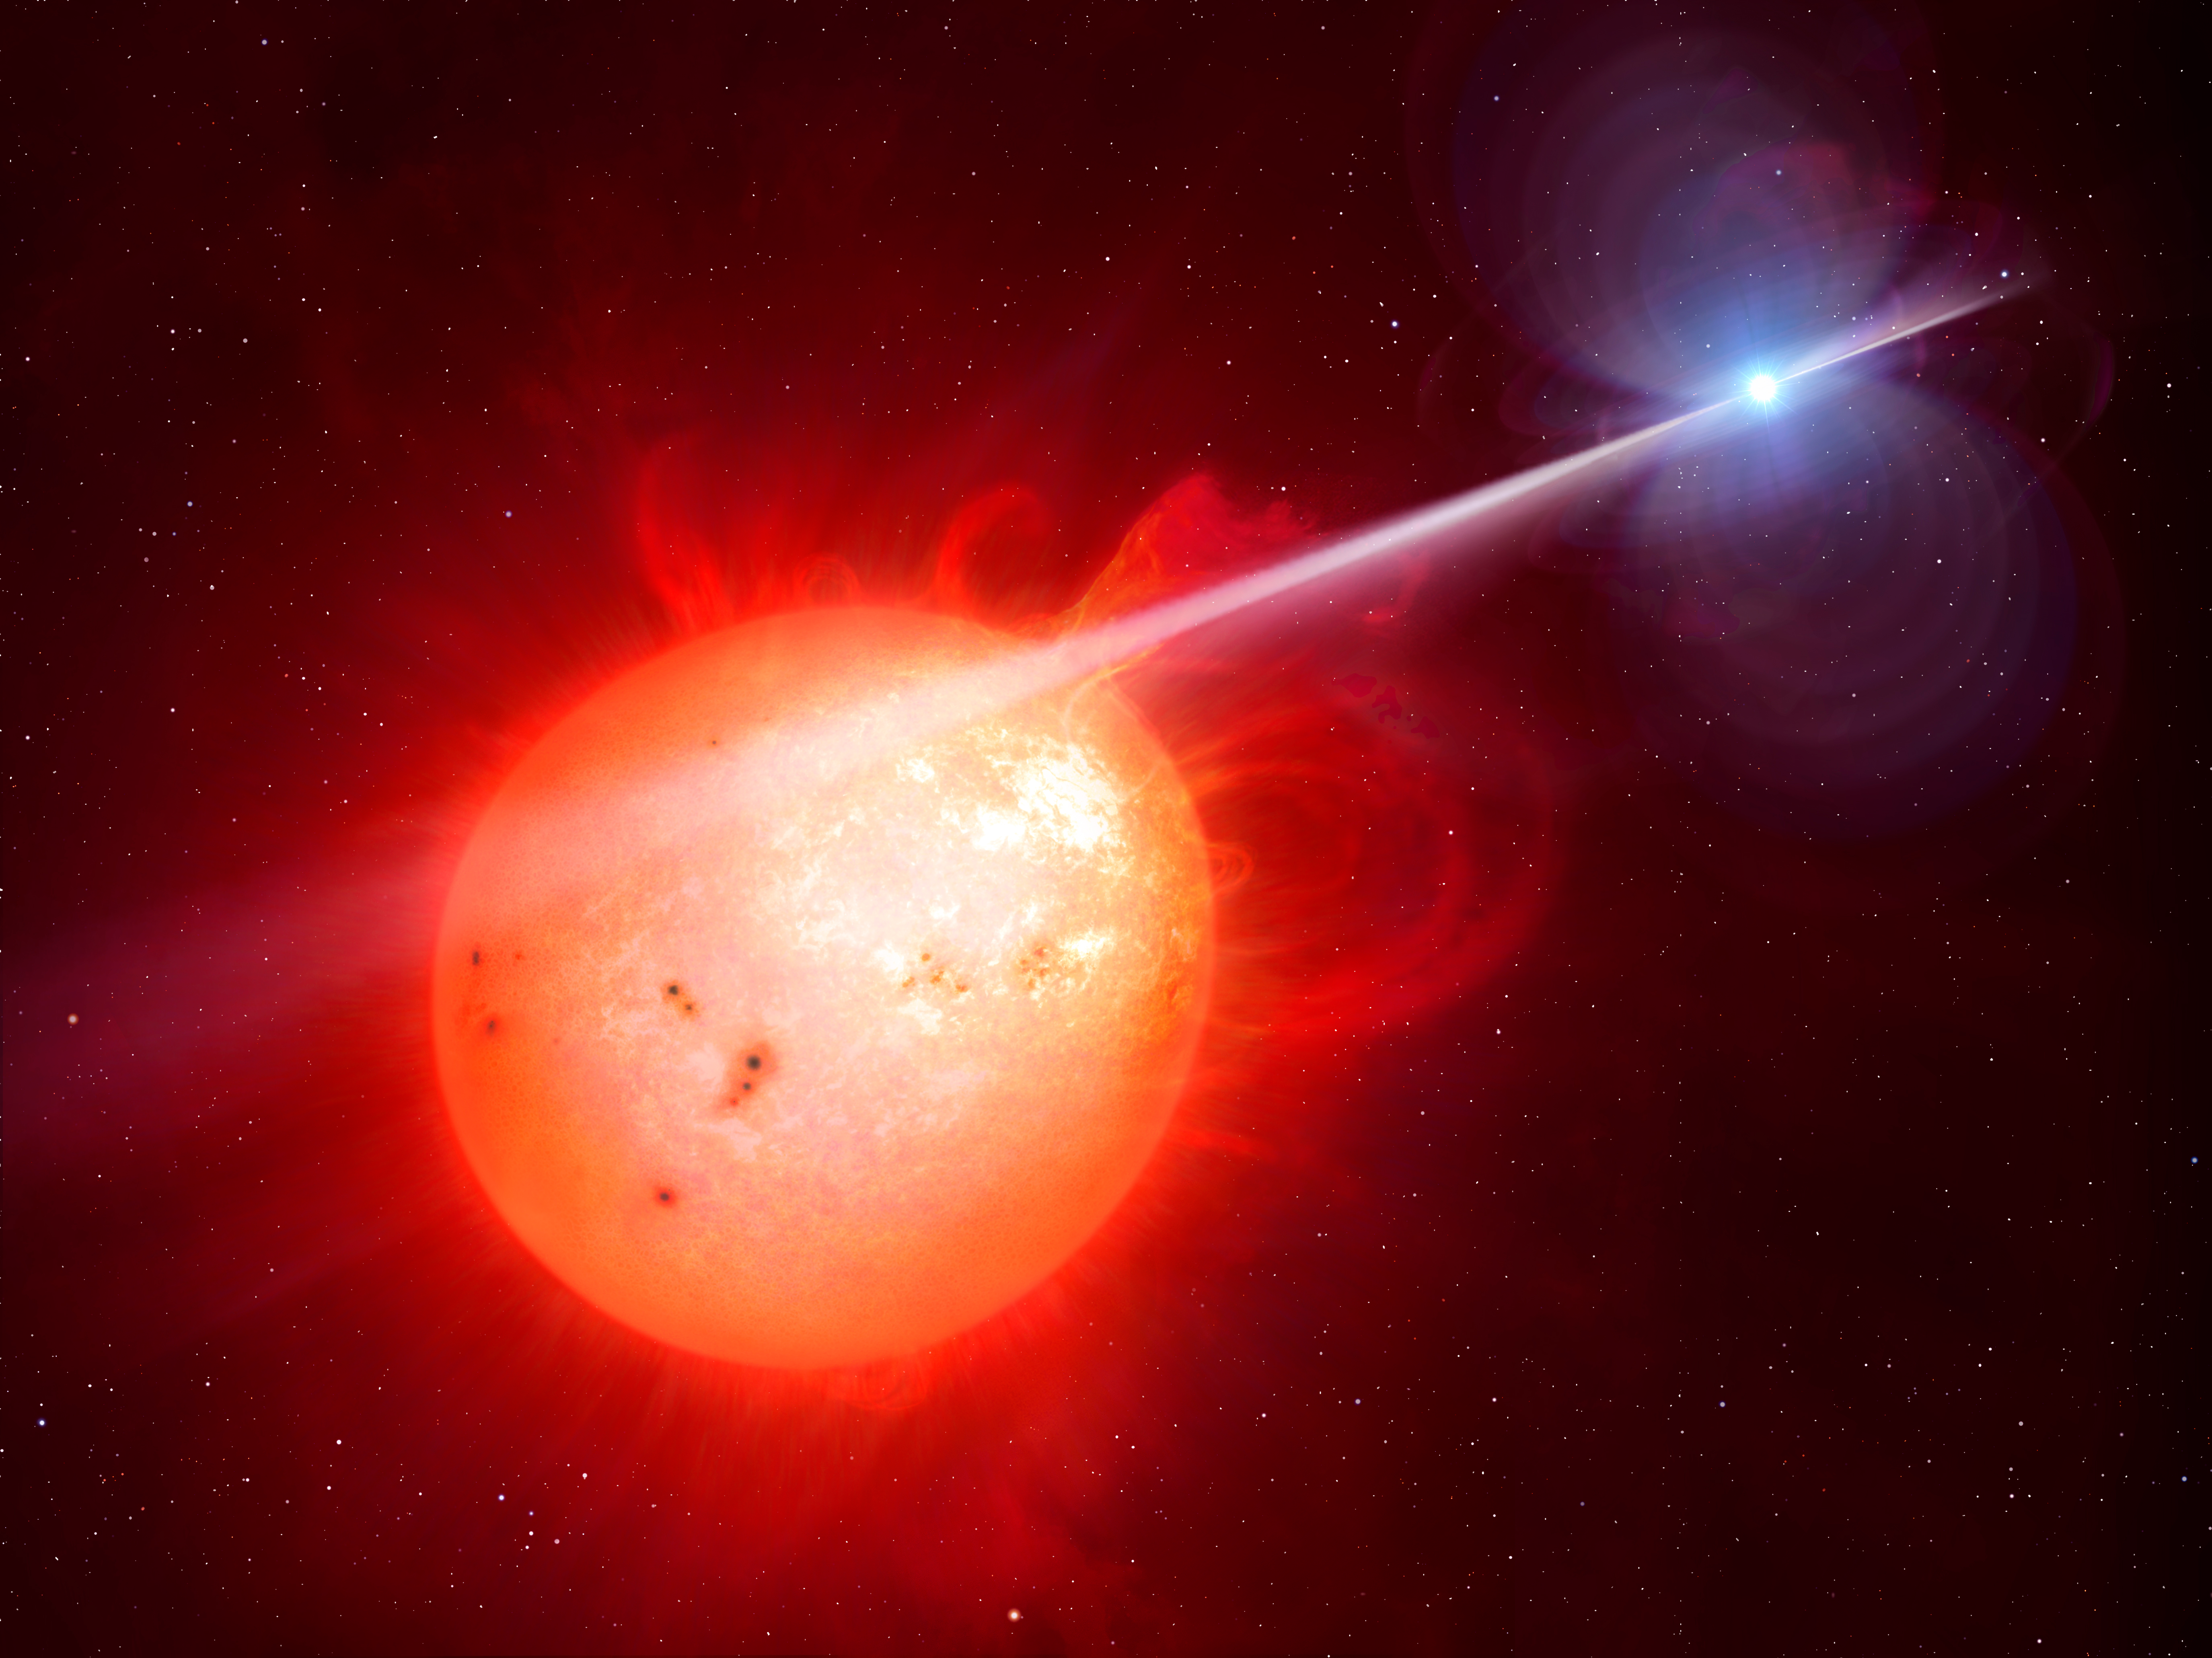

Artist’s impression of the exotic binary star system AR Scorpii

This artist’s impression shows the strange object AR Scorpii. In this unique double star a rapidly spinning white dwarf star (right) powers electrons up to almost the speed of light. These high energy particles release blasts of radiation that lash the companion red dwarf star (left) and cause the entire system to pulse dramatically every 1.97 minutes with radiation ranging from the ultraviolet to radio.

Credit: M. Garlick/University of Warwick, ESA/Hubble